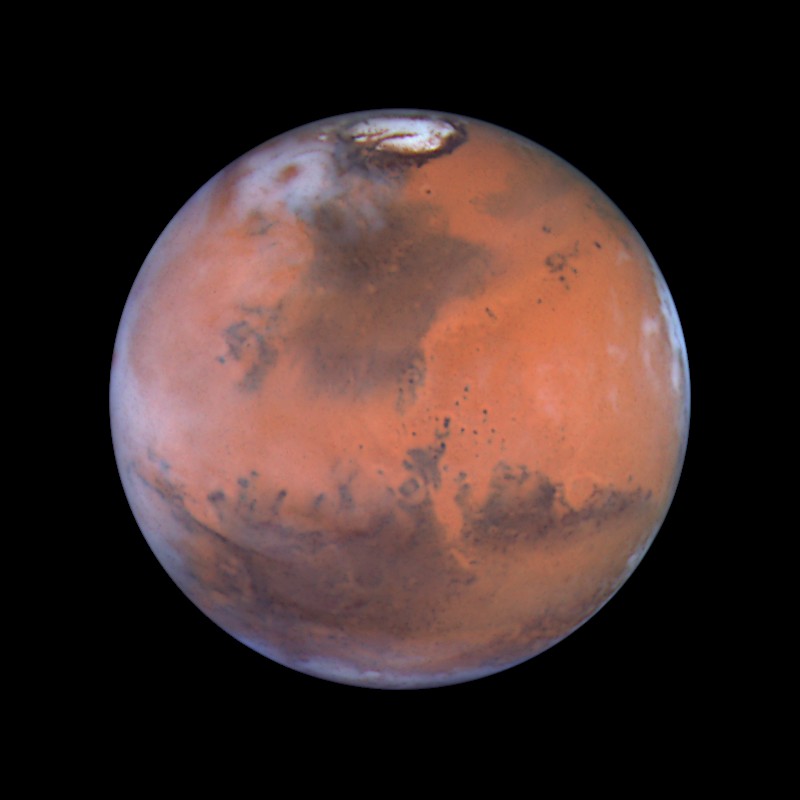

Mars at Opposition (the Acidalia Region)

This image is centered near the location of the Pathfinder landing site. Dark sand dunes that surround the polar cap merge into a large, dark region called Acidalia. This area, as shown by images from the Hubble telescope and other spacecraft, is composed of dark, sand-sized grains of pulverized volcanic rock. Below and to the left of Acidalia are the massive Martian canyon systems of Valles Marineris, some of which form long linear markings that were once thought by some to be canals. Early morning clouds can be seen along the left limb of the planet, and a large cyclonic storm composed of water ice is churning near the polar cap.

Credit: Steve Lee (University of Colorado), Jim Bell (Cornell University), Mike Wolff (Space Science Institute), and NASA/ESA